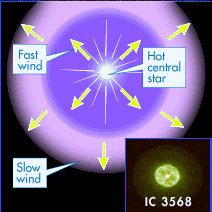

IC 3568 illustration

The end of a sun-like star's life was once thought to be simple: the star gracefully casting off a shell of glowing gas and then settling into a long retirement as a burned-out white dwarf.

Now, a dazzling collection of detailed views released today by several teams of astronomers using NASA's Hubble Space Telescope reveals surprisingly intricate glowing patterns spun into space by aging stars: pinwheels, lawn sprinkler style jets, elegant goblet shapes, and even some that look like a rocket engine's exhaust.

Credit: NASA & ESA